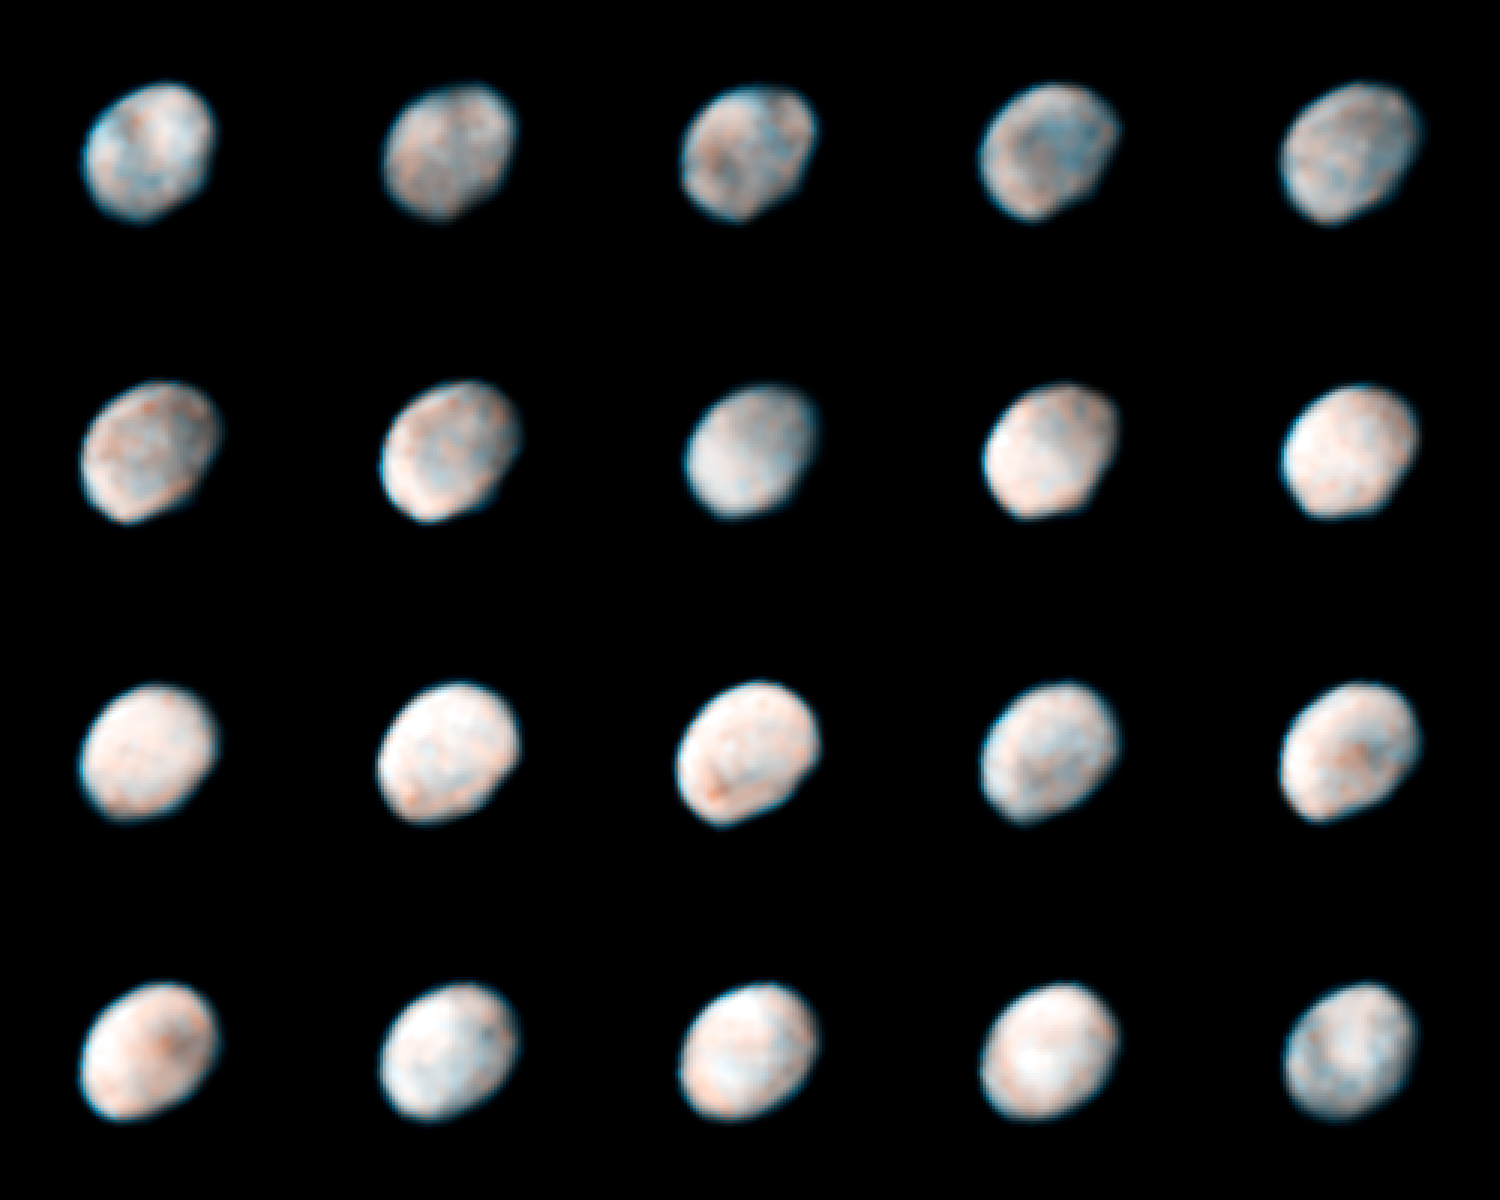

The Many Faces of Vesta

To prepare for the Dawn spacecraft's visit to Vesta, astronomers used Hubble's Wide Field Planetary Camera 2 to snap new images of the asteroid. These images were taken on May 14 and 16, 2007. Each frame shows time in hours and minutes based on Vesta's 5.34-hour rotation period. Using Hubble, astronomers mapped Vesta's southern hemisphere, a region dominated by a giant impact crater formed by a collision billions of years ago. The crater is 285 miles (456 kilometres) across, which is nearly equal to Vesta's 330-mile (530-kilometre) diameter.

Credit: NASA, ESA, and L. McFadden (University of Maryland)